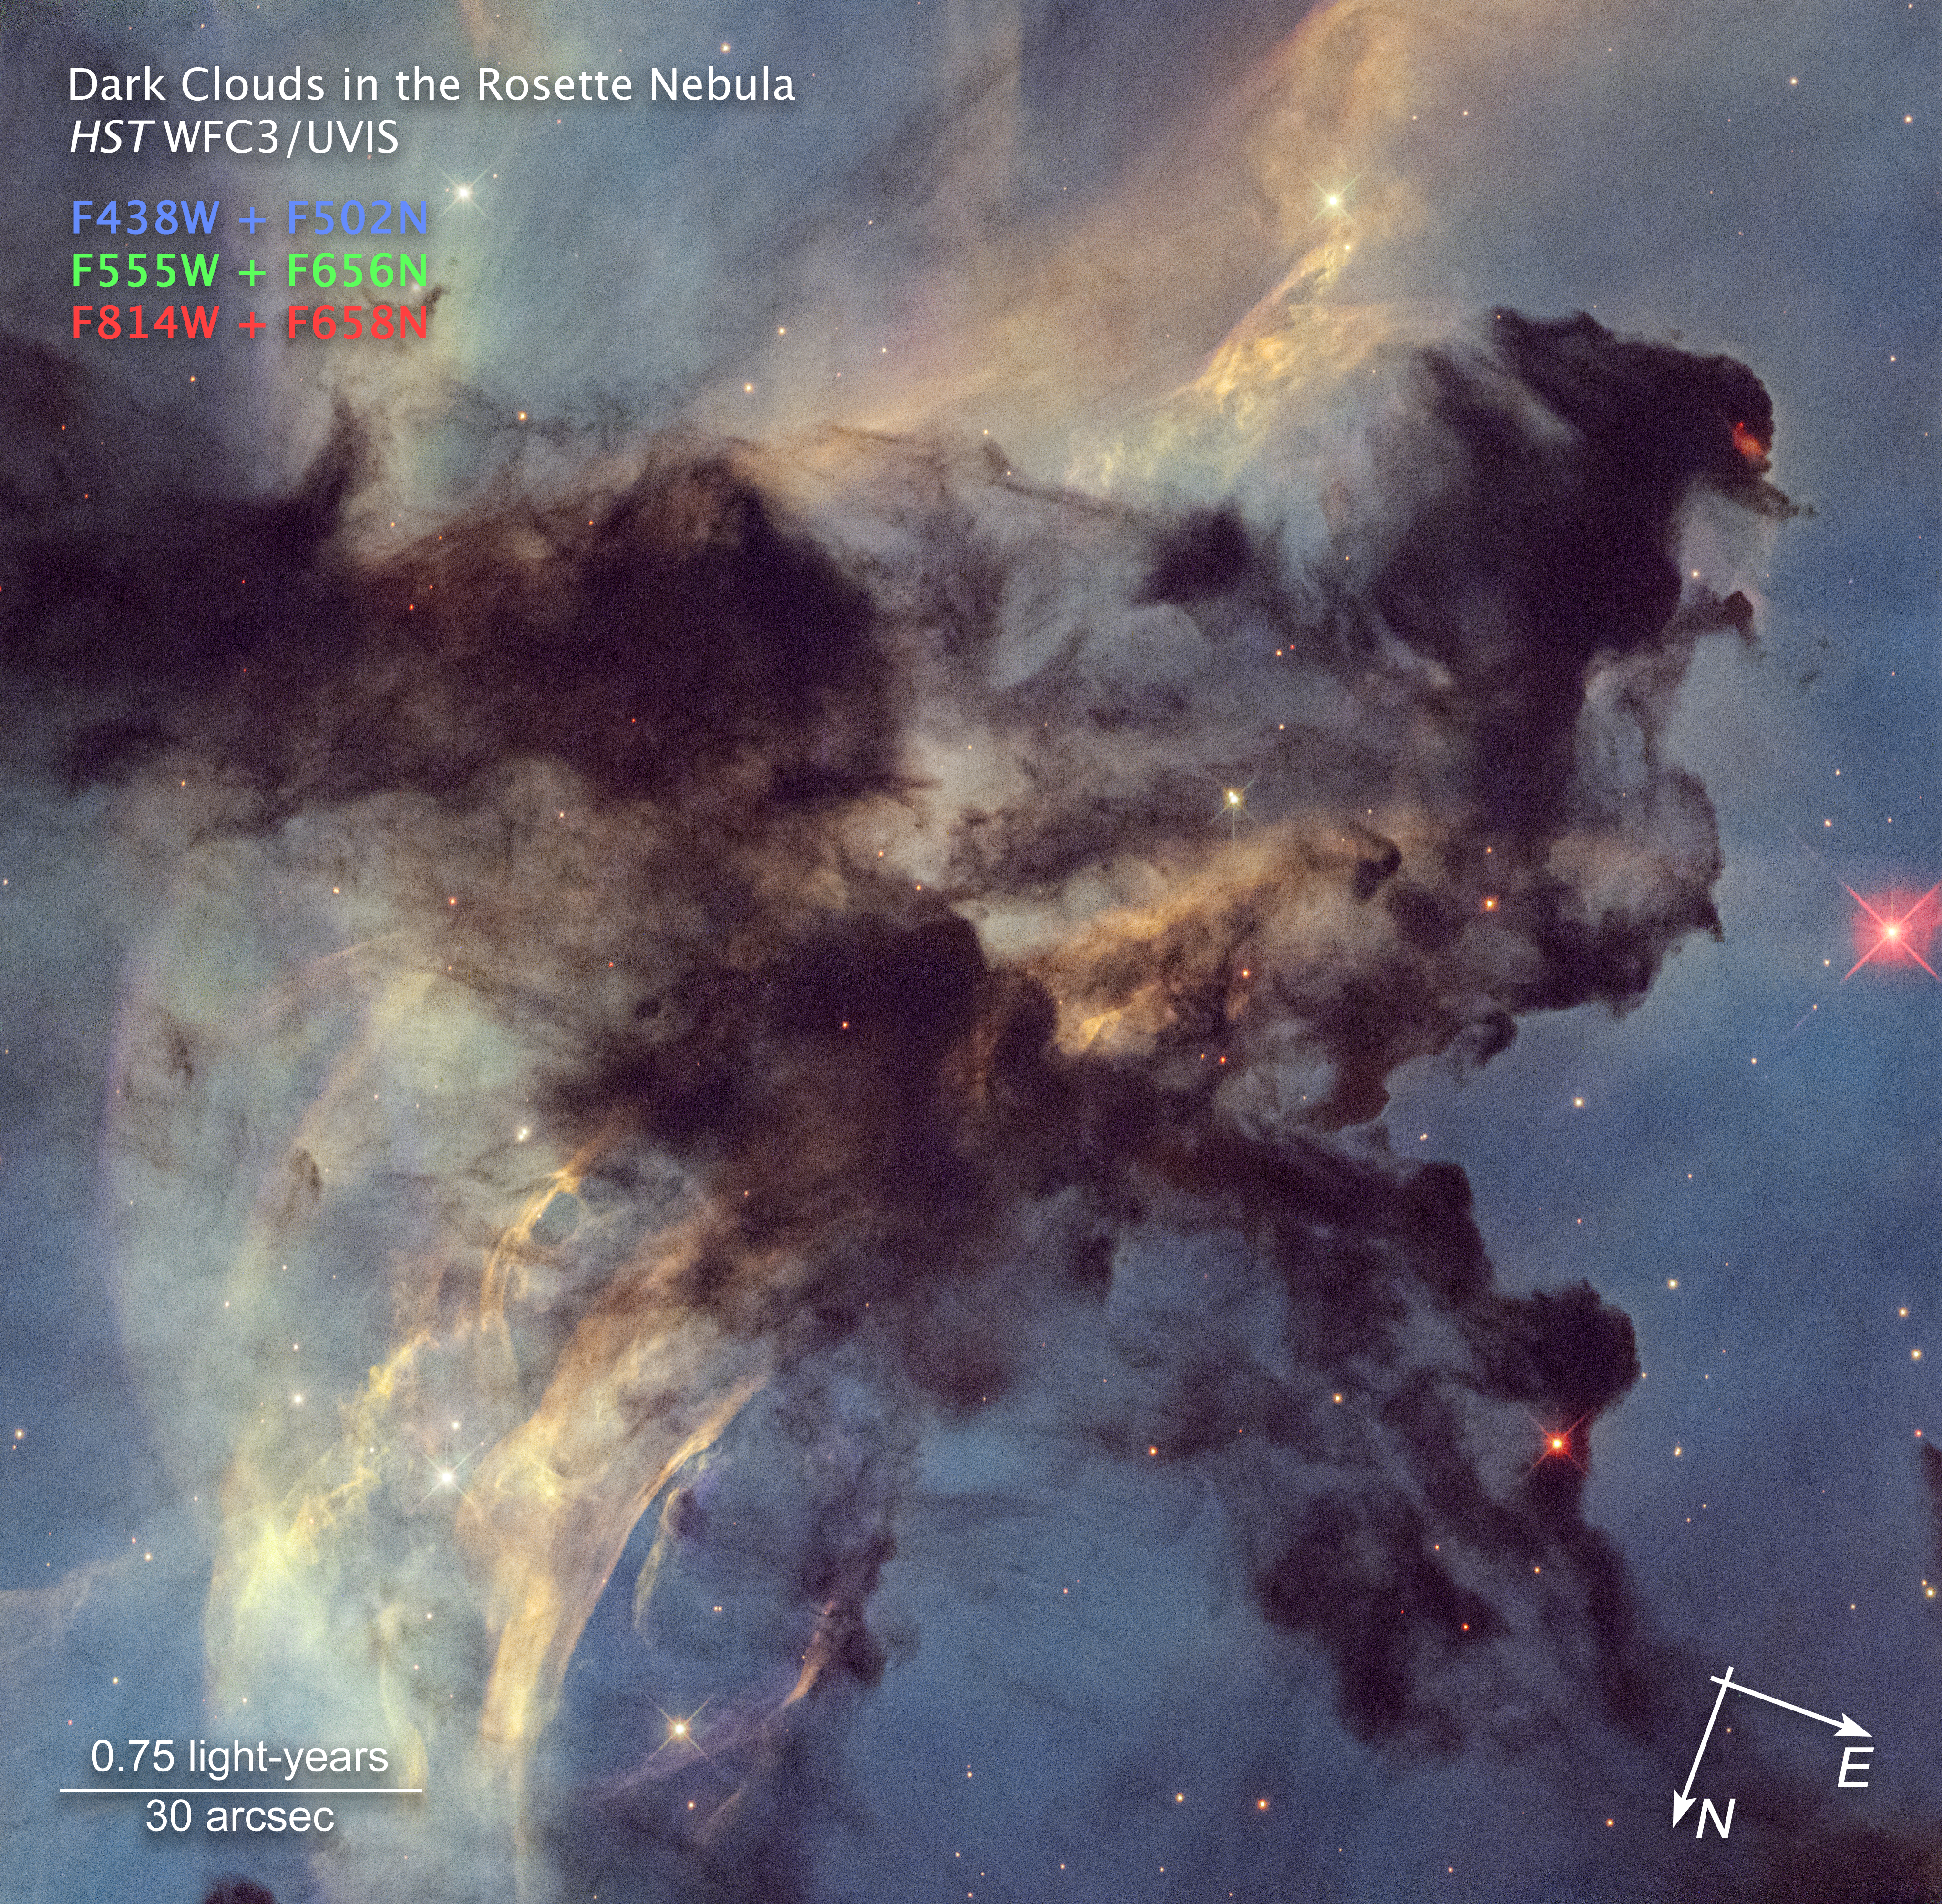

Rosette Nebula (annotated)

This is a Hubble Space Telescope photo of a small portion of the Rosette Nebula, a huge star-forming region spanning 100 light-years across and located 5,200 light-years away. Hubble zooms into a small portion of the nebula that is only 4 light-years across (the approximate distance between our Sun and the neighbouring Alpha Centauri star system.) Dark clouds of hydrogen gas laced with dust are silhouetted across the image. The clouds are being eroded and shaped by the seething radiation from the cluster of larger stars in the center of the nebula (NGC 2440). An embedded star seen at the tip of a dark cloud in the upper right portion of the image is launching jets of plasma that are crashing into the cold cloud around it. The resulting shock wave is causing a red glow. The colours come from the presence of hydrogen, oxygen, and nitrogen.

Credit: NASA, ESA, STScI